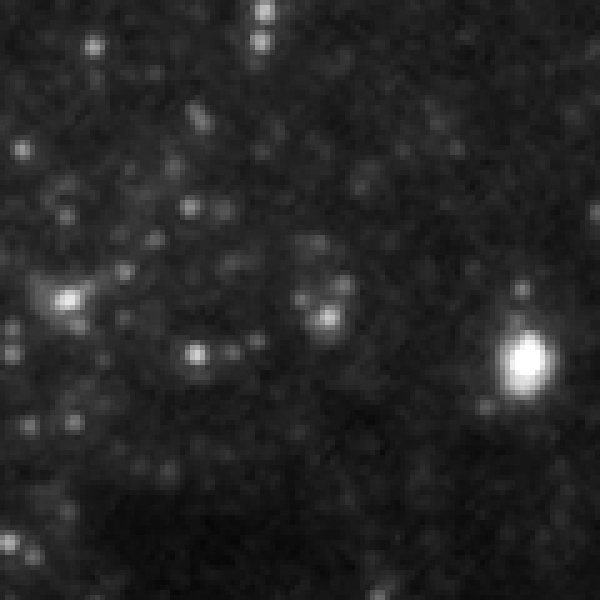

SN 2005cs in M51 - before progenitor star's explosion

In 2005 a supernova exploded in the galaxy M 51, which is also known as the Whirlpool Galaxy. The type II supernova occured in the inner spiral arm of the galaxy ans was observed by German amateur astronomers.

This picture taken by Hubble shows in the very center the progenitor star of the supernova, barley visible for the telescope.

Credit: NASA, ESA, W. Li and A. Filippenko (University of California, Berkeley), S. Beckwith (STScI), and The Hubble Heritage Team (STScI/AURA)